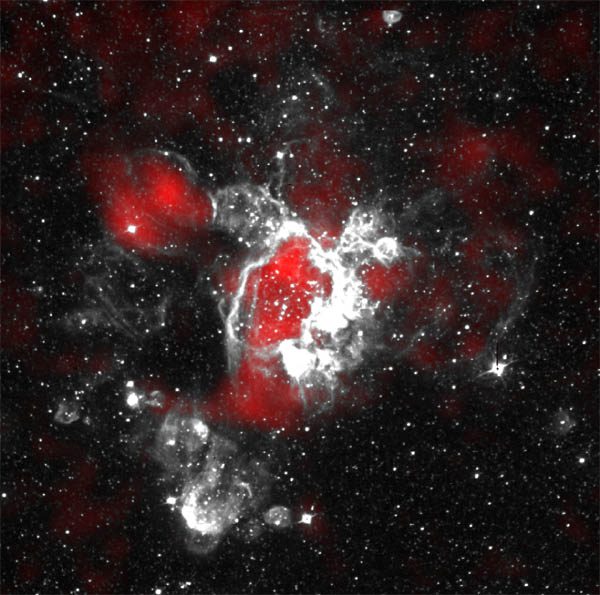

Gaseous Streamers Flutter in Stellar Breeze

Composite image of ground-based [S II] image (white; taken at the Curtis Schmidt Telescope at the Cerro Tololo Inter-American Observatory in Chile ) and ROSAT PSPC X-ray image (red).

Credit: R. Chris Smith (CTIO) and Y.-H. Chu (UICU)